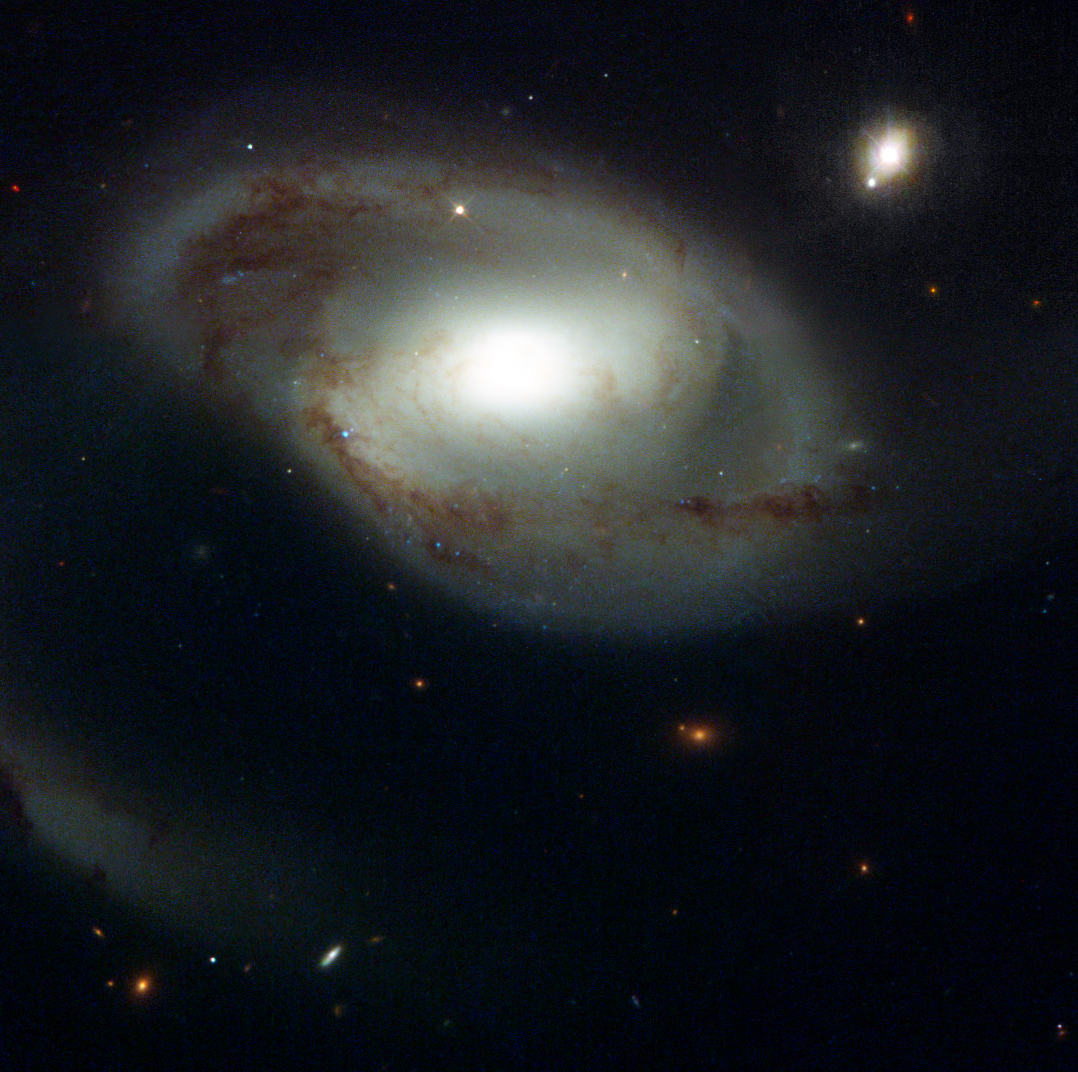

Odd Couple Widely Separated by Time and Space

Appearances can be deceiving. In this NASA/ESA Hubble Space Telescope image, an odd celestial duo, the spiral galaxy NGC 4319 [center] and a quasar called Markarian 205 [upper right], appear to be neighbors. In reality, the two objects don't even live in the same city. They are separated by time and space. NGC 4319 is 80 million light-years from Earth. Markarian 205 (Mrk 205) is more than 14 times farther away, residing 1 billion light-years from Earth. The apparent close alignment of Mrk 205 and NGC 4319 is simply a matter of chance.

Credit: NASA/ESA and The Hubble Heritage Team (STScI/AURA)